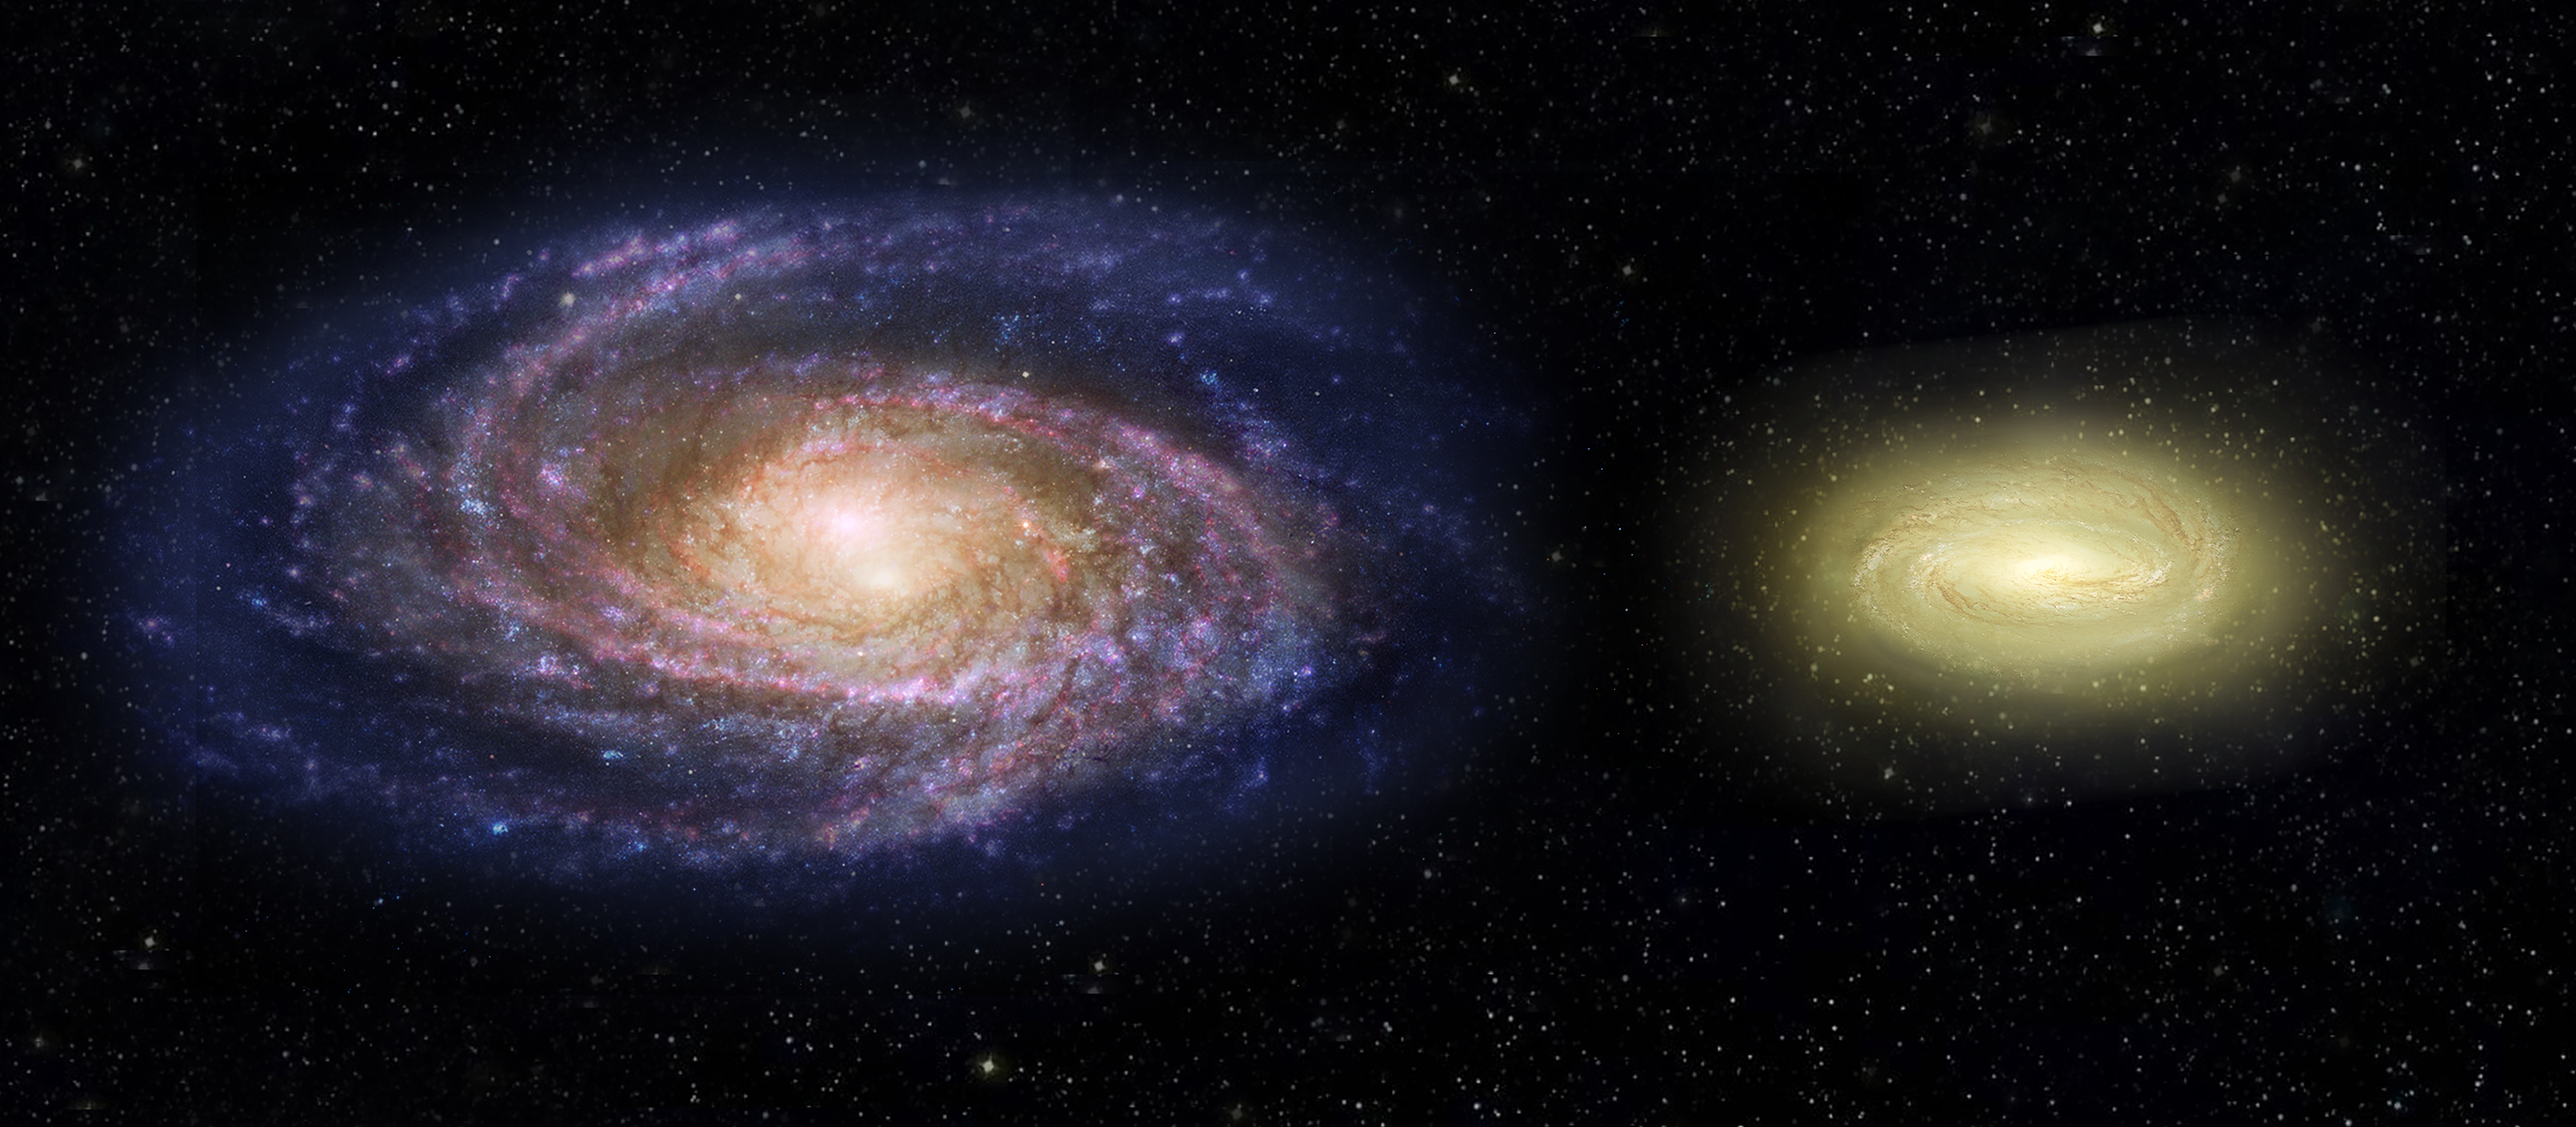

MACS2129-1 compared with the Milky Way (artist’s impression)

This artist’s impression shows what the young, dead, disc galaxy MACS2129-1, right, would look like when compared with the Milky Way galaxy, left. Although three times as massive as the Milky Way, it is only half the size. MACS2129-1 is also spinning more than twice as fast as the Milky Way. The artist’s impressions shows regions within the Milky Way in blue from bursts of star formation, while the young, dead galaxy is yellow, signifying an older star population and no new star birth.

Credit: NASA, ESA, and Z. Levy (STScI)